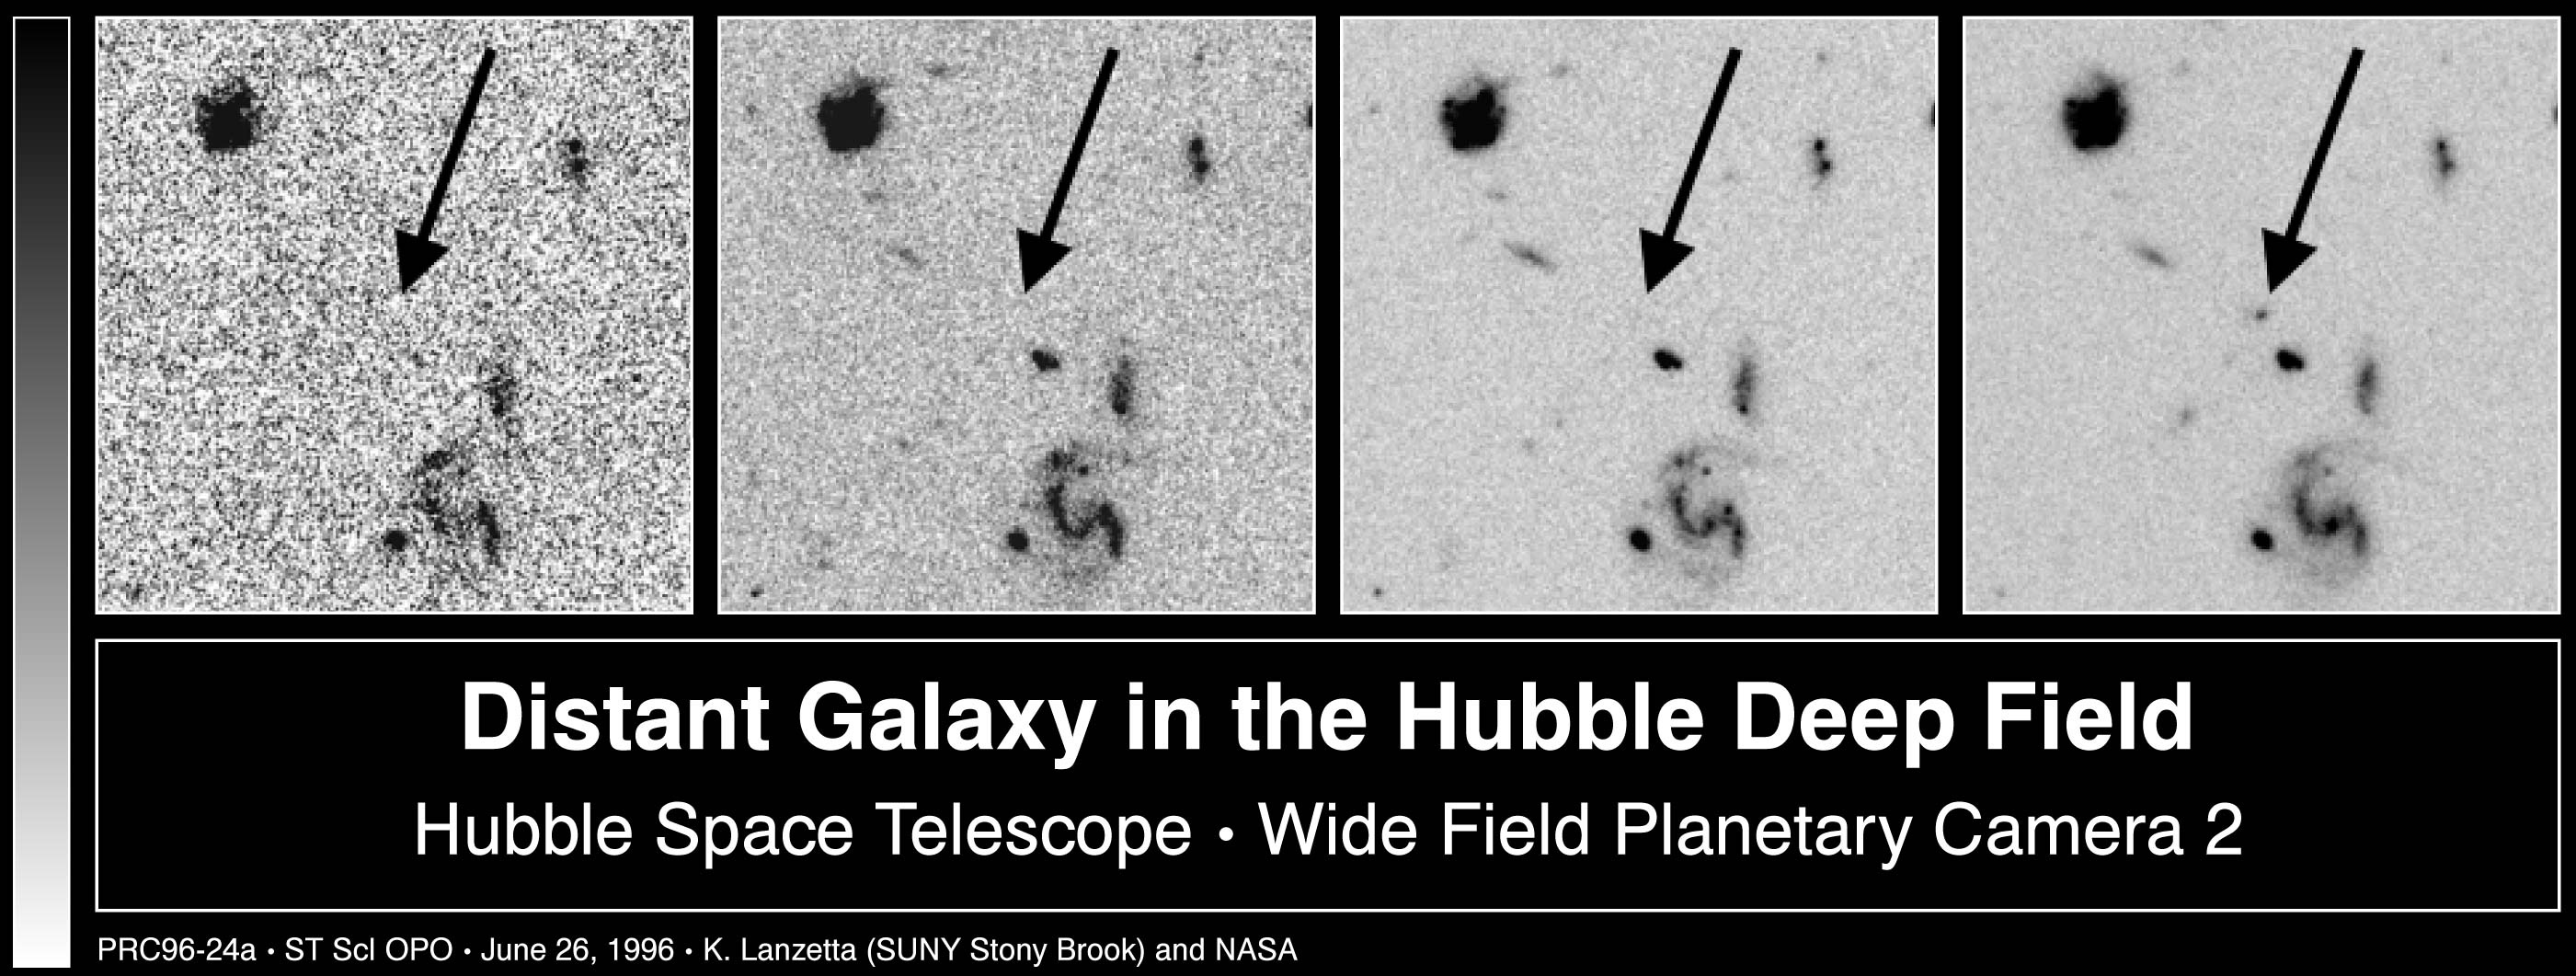

Distant Galaxy in the Hubble Deep Field

Series of four panels that illustrate the distant-galaxy identification technique. Four panels that show (top to bottom, or right to left when rotated correctly) F814W filter, F606W filter, F450W filter, and F300W filter images, or near-infrared through near-ultraviolet images.

Credit: Ken Lanzetta and Amos Yahil (State University of New York at Stony Brook), and NASA/ESA